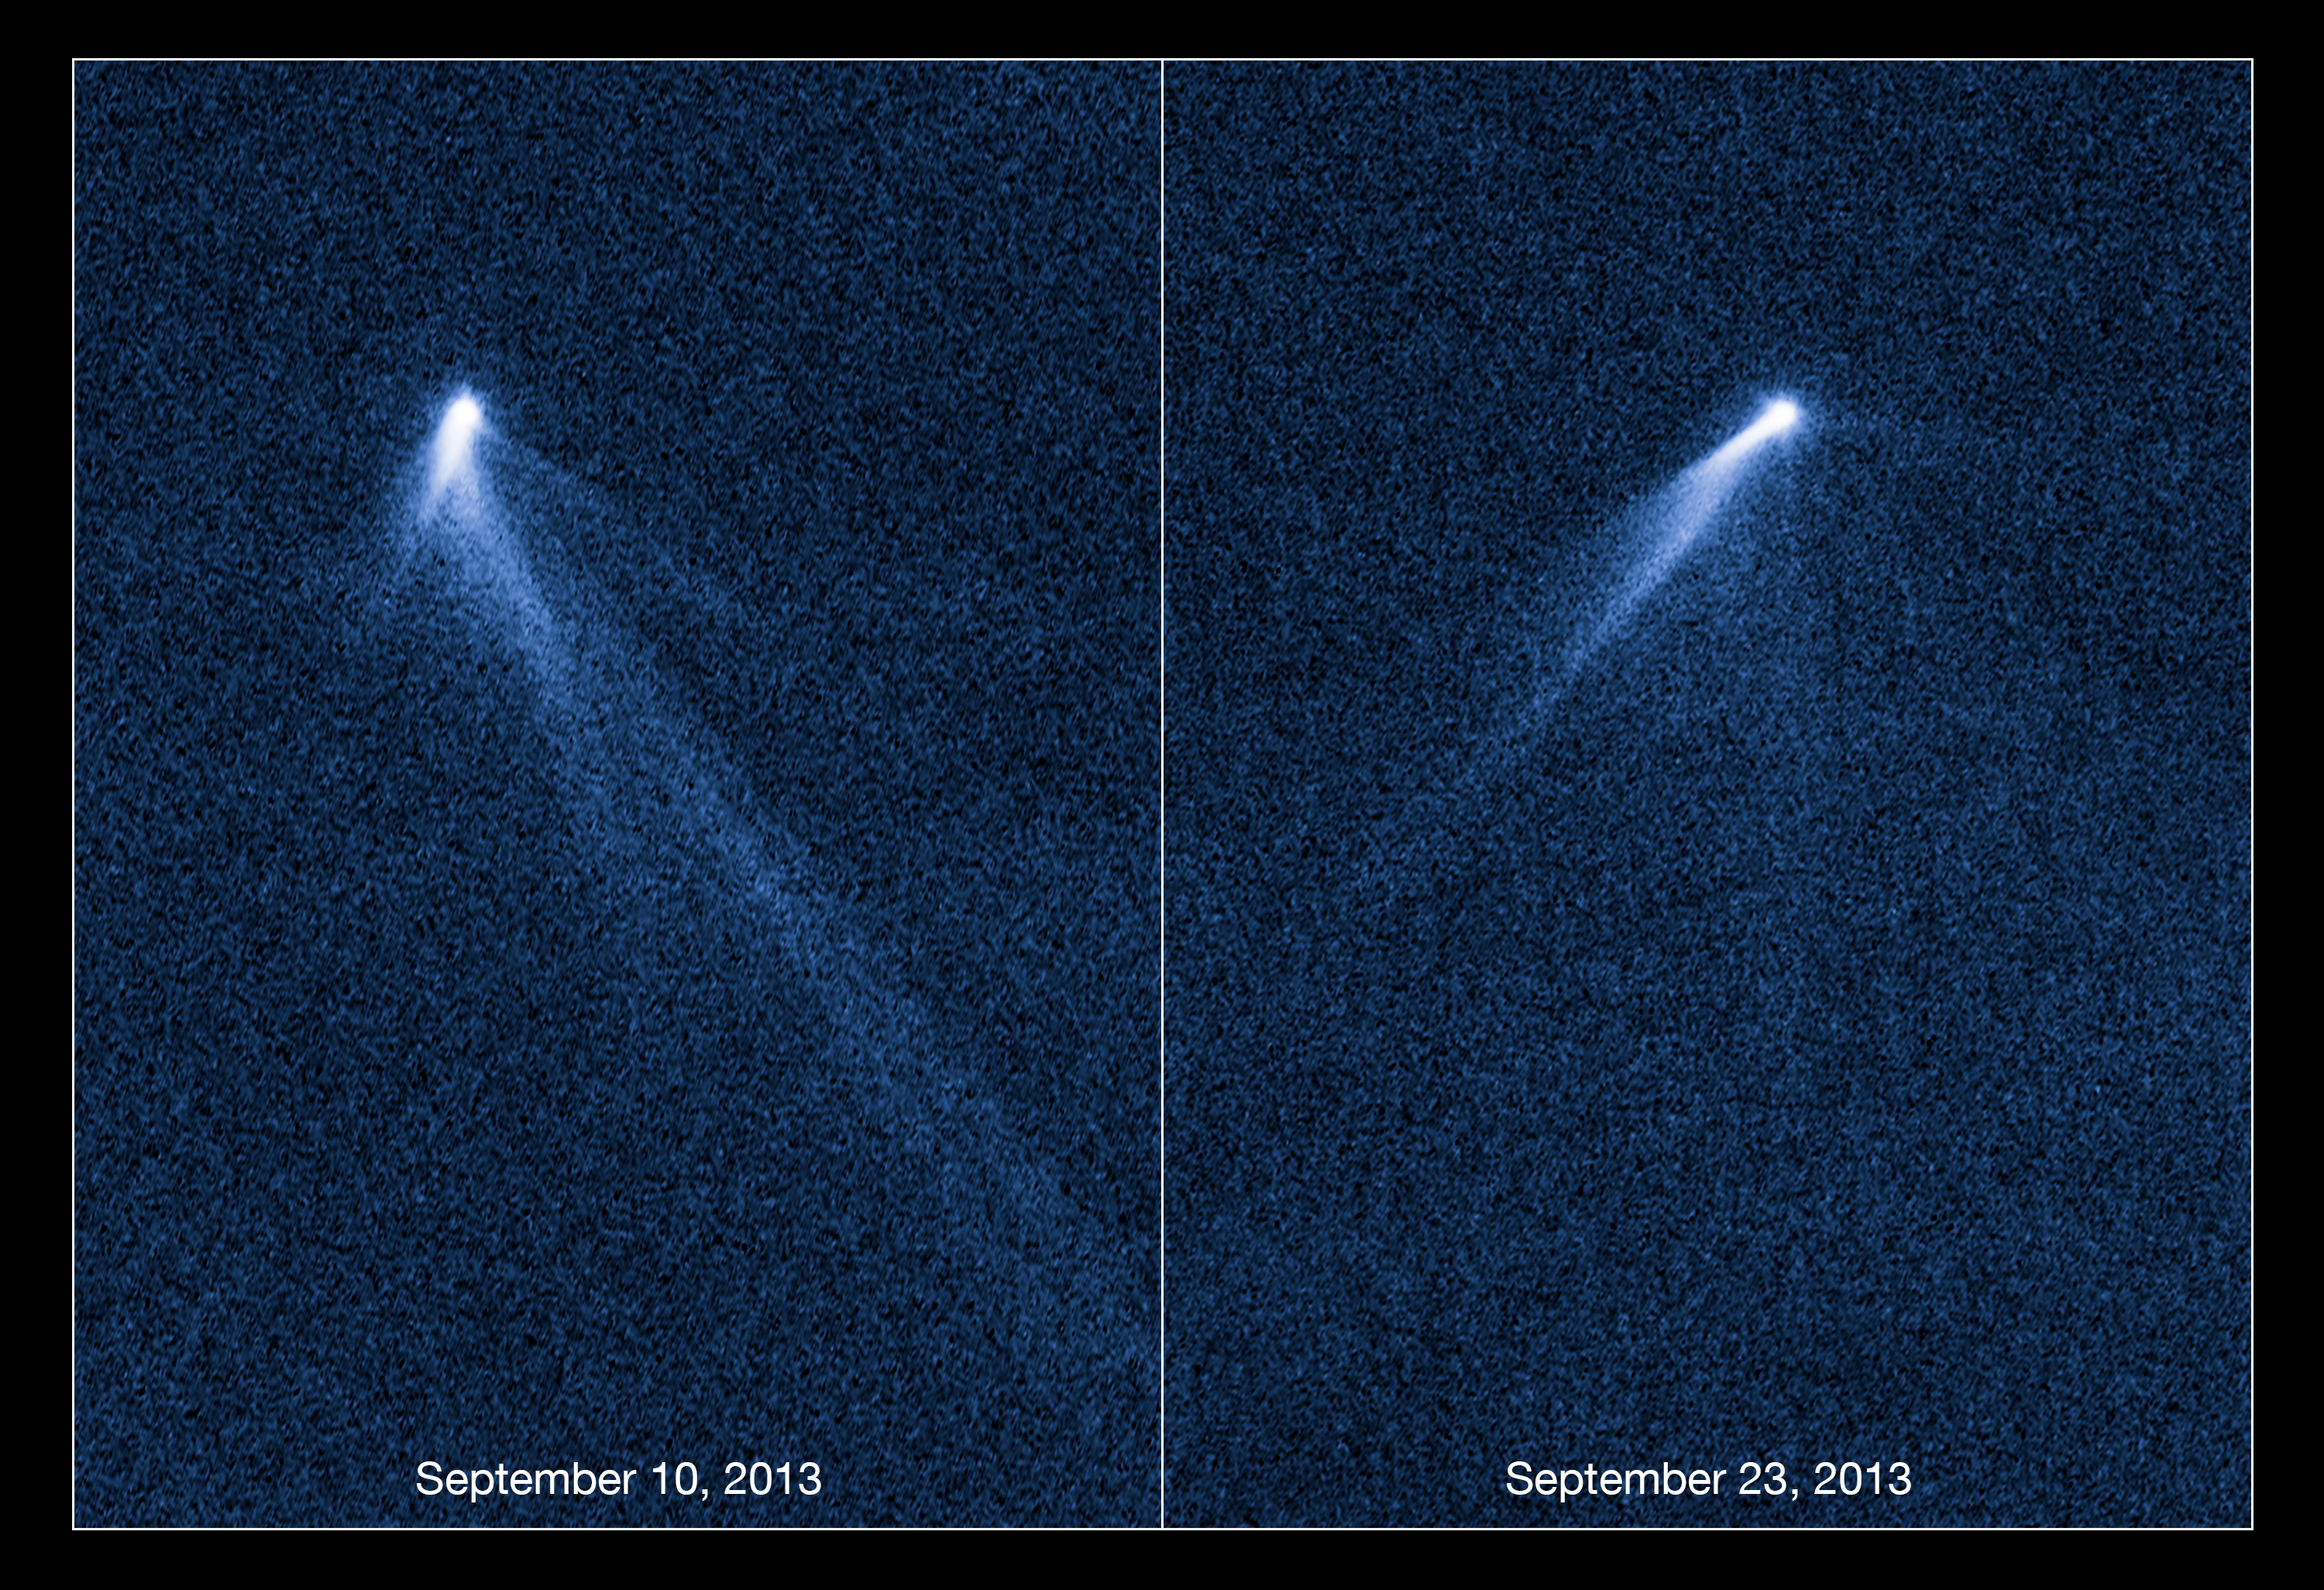

Hubble views extraordinary multi-tailed asteroid P/2013 P5

These NASA/ESA Hubble Space Telescope images reveal a never-before seen set of six comet-like tails radiating from a body in the asteroid belt and designated P/2013 P5.

The asteroid was discovered as an unusually fuzzy looking object by astronomers using the Pan-STARRS survey telescope in Hawaii. The multiple tails were discovered in Hubble images taken on 10 September 2013. When Hubble returned to the asteroid on 23 September its appearance had totally changed — it looked as if the entire structure had swung around.

One interpretation is that the asteroid's rotation rate has increased to the point where dust is falling off the surface and escaping into space, where it is swept out into tails by the pressure of sunlight. According to this theory, the asteroid's spin has been accelerated by the gentle push of sunlight. Based on an analysis of the tail structure, the object has ejected dust for at least five months.

These visible-light images were taken with Hubble's Wide Field Camera 3. P/2013 P5 is seen on the left as viewed on 10 September 2013, and on the right as seen on 23 September 2013.

Credit: NASA, ESA, D. Jewitt (University of California, Los Angeles), J. Agarwal (Max Planck Institute for Solar System Research), H. Weaver (Johns Hopkins University Applied Physics Laboratory), M. Mutchler (STScI), and S. Larson (University of Arizona)